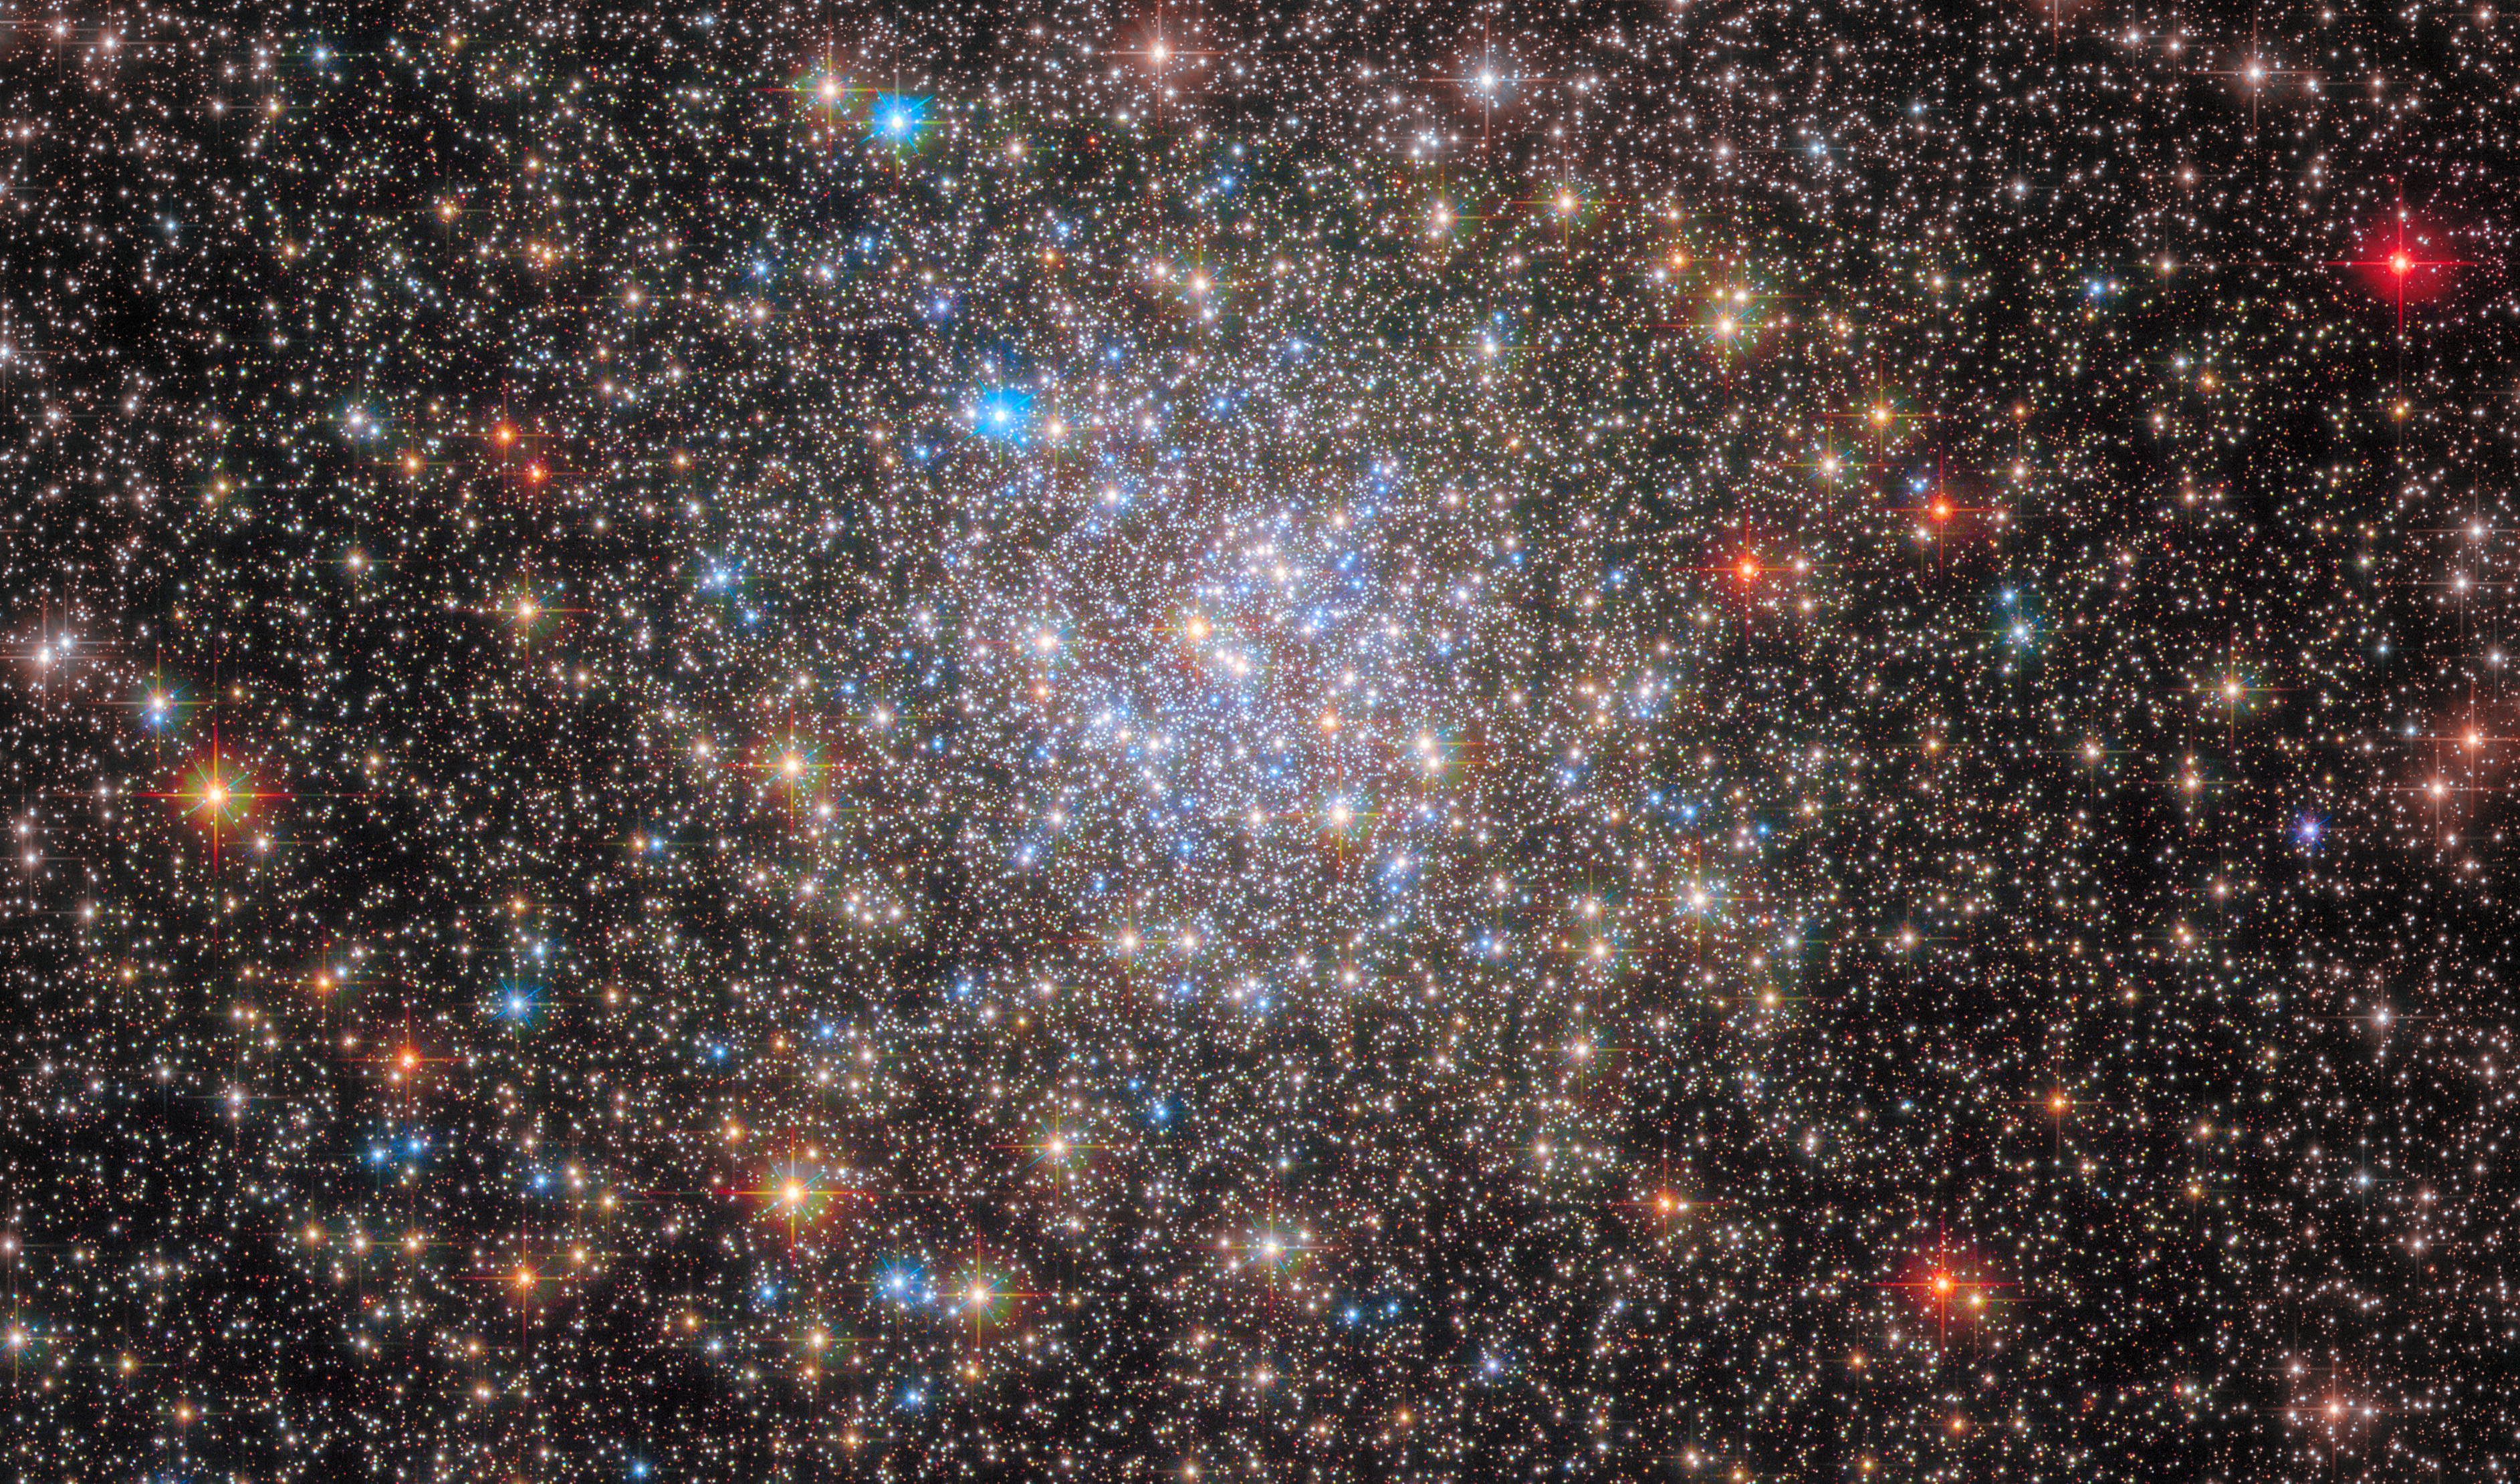

Stargazing in NGC 6355

The scattered stars of the globular cluster NGC 6355 are strewn across this image from the NASA/ESA Hubble Space Telescope. This globular cluster lies less than 50,000 light-years from Earth in the Ophiuchus constellation. NGC 6355 is a galactic globular cluster that resides in our Milky Way galaxy's inner regions.

Globular clusters are stable, tightly bound clusters of tens of thousands to millions of stars, and can be found in all types of galaxies. Their dense populations of stars and mutual gravitational attraction give these clusters a roughly spherical shape, with a bright concentration of stars surrounded by an increasingly sparse sprinkling of stars. The dense, bright core of NGC 6355 was picked out in crystal-clear detail by Hubble in this image, and is the crowded area of stars towards the centre of this image.

With its vantage point above the distortions of the atmosphere, Hubble has revolutionised the study of globular clusters. It is almost impossible to distinguish the stars in globular clusters from one another with ground-based telescopes, but astronomers have been able to use Hubble to study the constituent stars of globular clusters in detail. This Hubble image of NGC 6355 contains data from both the Advanced Camera for Surveys and Wide Field Camera 3.

Credit: ESA/Hubble & NASA, E. Noyola, R. Cohen